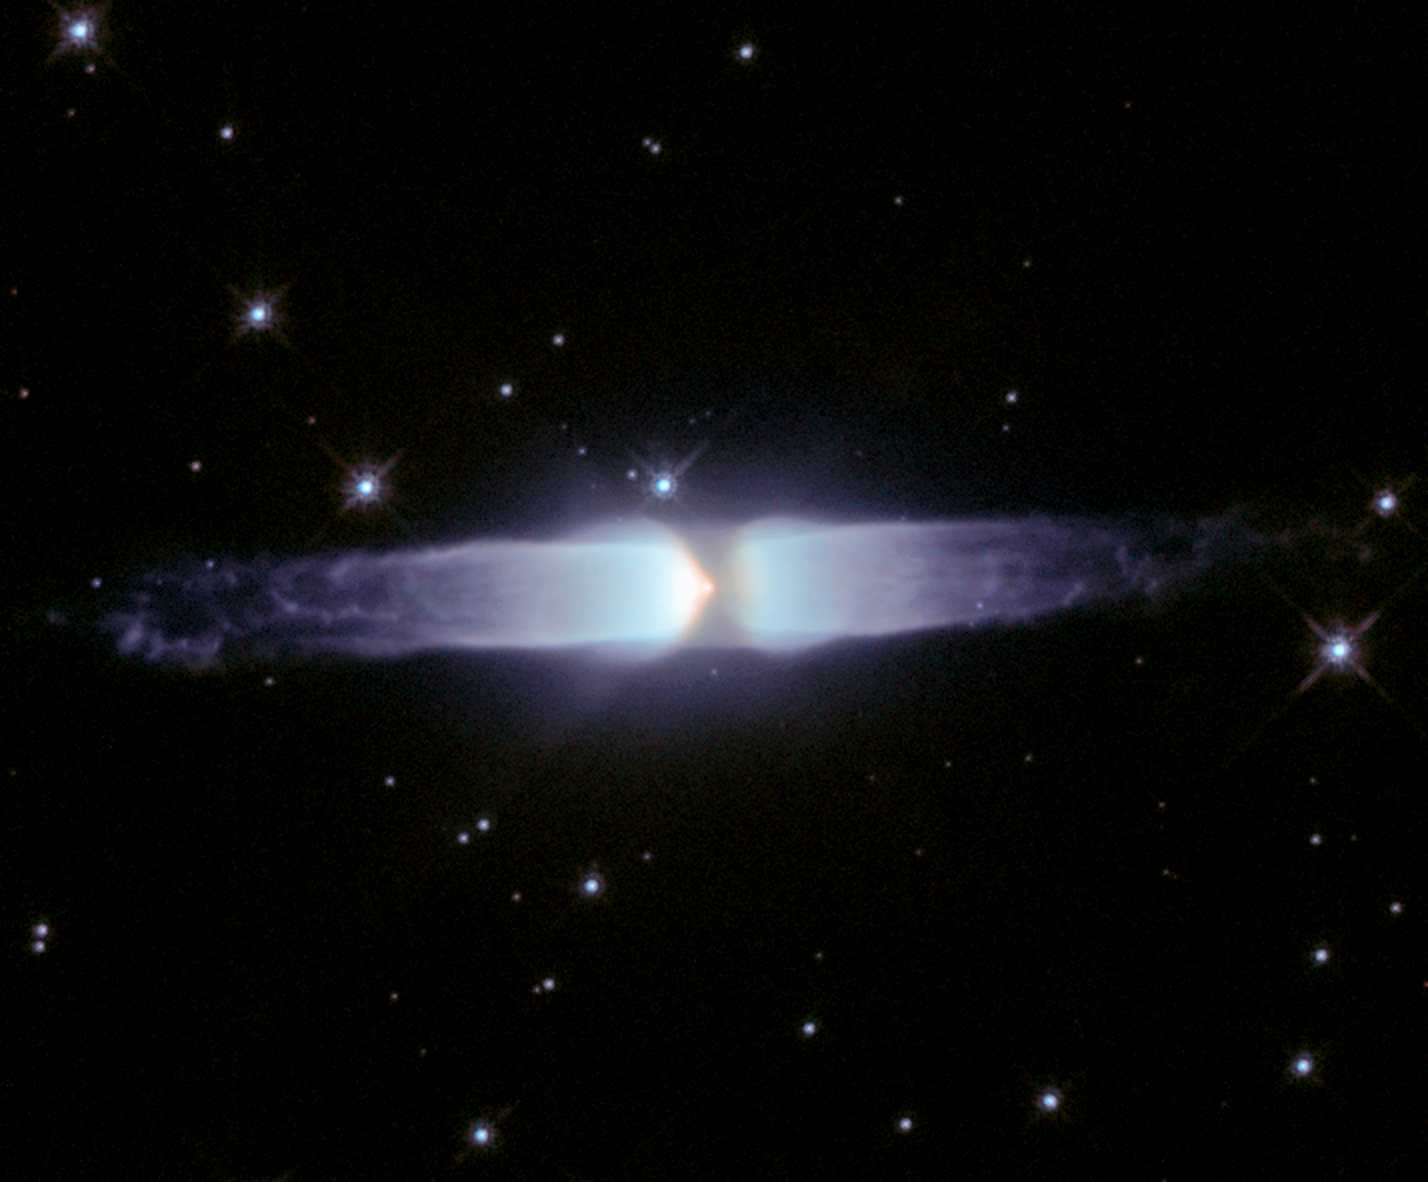

A glimpse into the heart of a dying star

This image, taken with the NASA/ESA Hubble Space Telescope, shows the young planetary nebula Henize 3-401. Hubble's extraordinary vision reveals that it is one of the most elongated planetary nebulae found so far. The image shows two very long cylindrical outflows with intricate thread-like structures and tattered ends. We are seeing the central star responsible for the beautiful display for the first time in this image. Henize 3-401 is located in the constellation of Carina (the Keel) at an approximate distance of 10 000 light-years. This picture is composed of three exposures obtained with Hubble's Wide Field Planetary Camera 2 on 12 June 1997. The three exposures were taken through a wide orange filter (1200 seconds) shown in blue, a hydrogen-alpha filter (400 seconds) shown in red, and a singly ionised sulphur filter (1200 seconds) shown in green.

Credit: European Space Agency and Pedro Garcma-Lario (ESA ISO Data Centre)